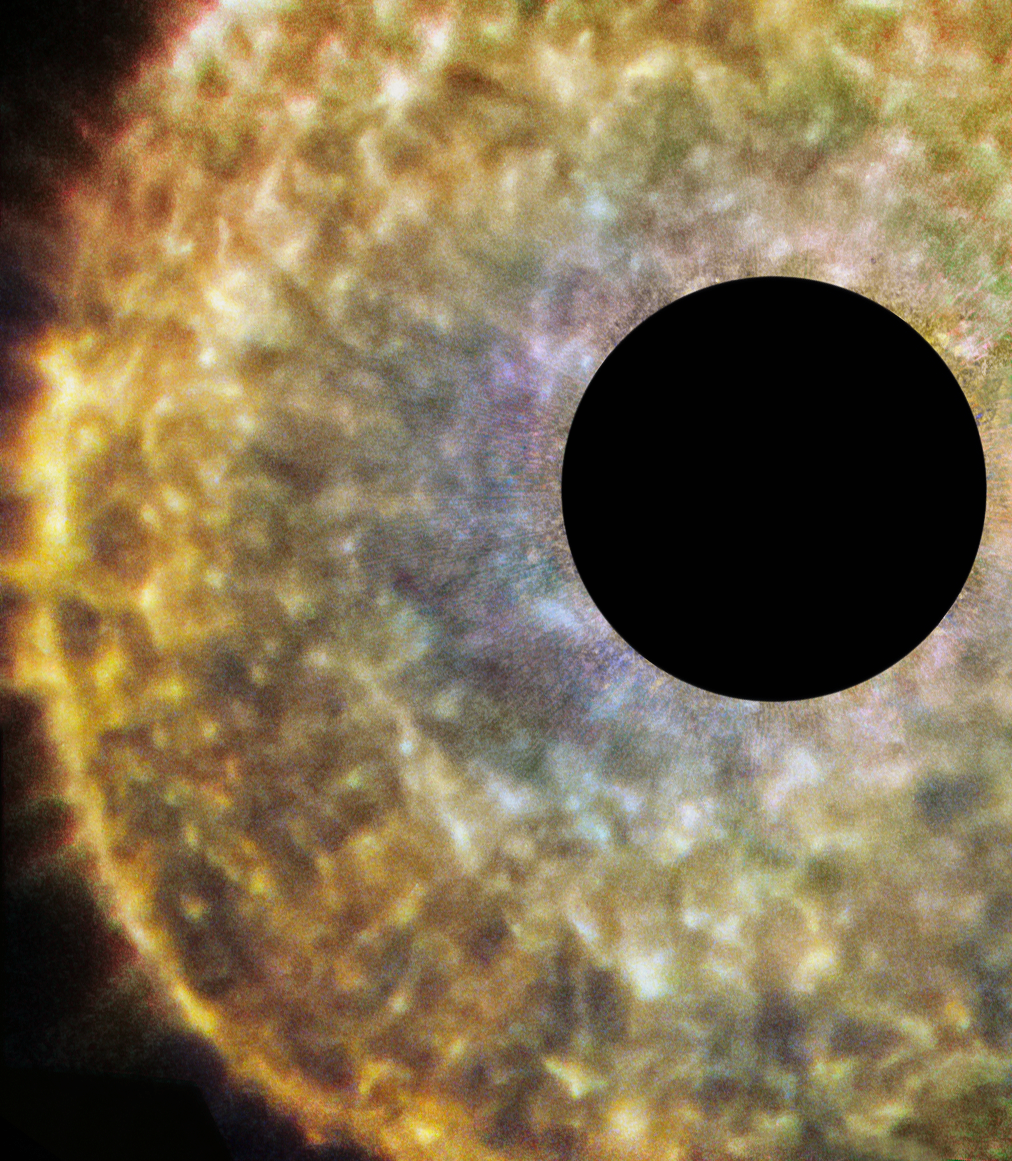

R Sculptoris and its hidden companion

This new NASA/ESA Hubble Space Telescope image shows a star known as R Sculptoris, a red giant located 1500 light-years from Earth in the constellation of Sculptor. Recent observations have shown that the material surrounding R Sculptoris actually forms a spiral structure — a phenomenon probably caused by a hidden companion star orbiting the star. Systems with multiple stars often lead to unusual or unexpected morphologies, as seen, for example, in the wide range of striking planetary nebulae that Hubble has imaged.

R Sculptoris is an example of an asymptotic giant branch (AGB) star. All stars with initial masses up to about eight times that of the Sun will eventually become red giants in the later stages of their lives. They start to cool down and lose a large amount of their mass in a steady, dense wind that streams outwards from the star. With this constant loss of material, red giants like R Sculptoris provide a good portion of the raw materials — dust and gas — used for the formation of new generations of stars and planets. They also show what is likely to happen to the Sun in a few billion years from now, and help astronomers to understand how the elements we are made up of are distributed throughout the Universe.

R Sculptoris itself is located outside the plane of the Milky Way and is easily visible using a moderately sized amateur telescope. In this part of the sky far from the galactic plane, there are relatively few stars but many faint and distant galaxies can be seen.

The black region at the centre of the image has been artificially masked.

Credit: ESA/Hubble & NASA